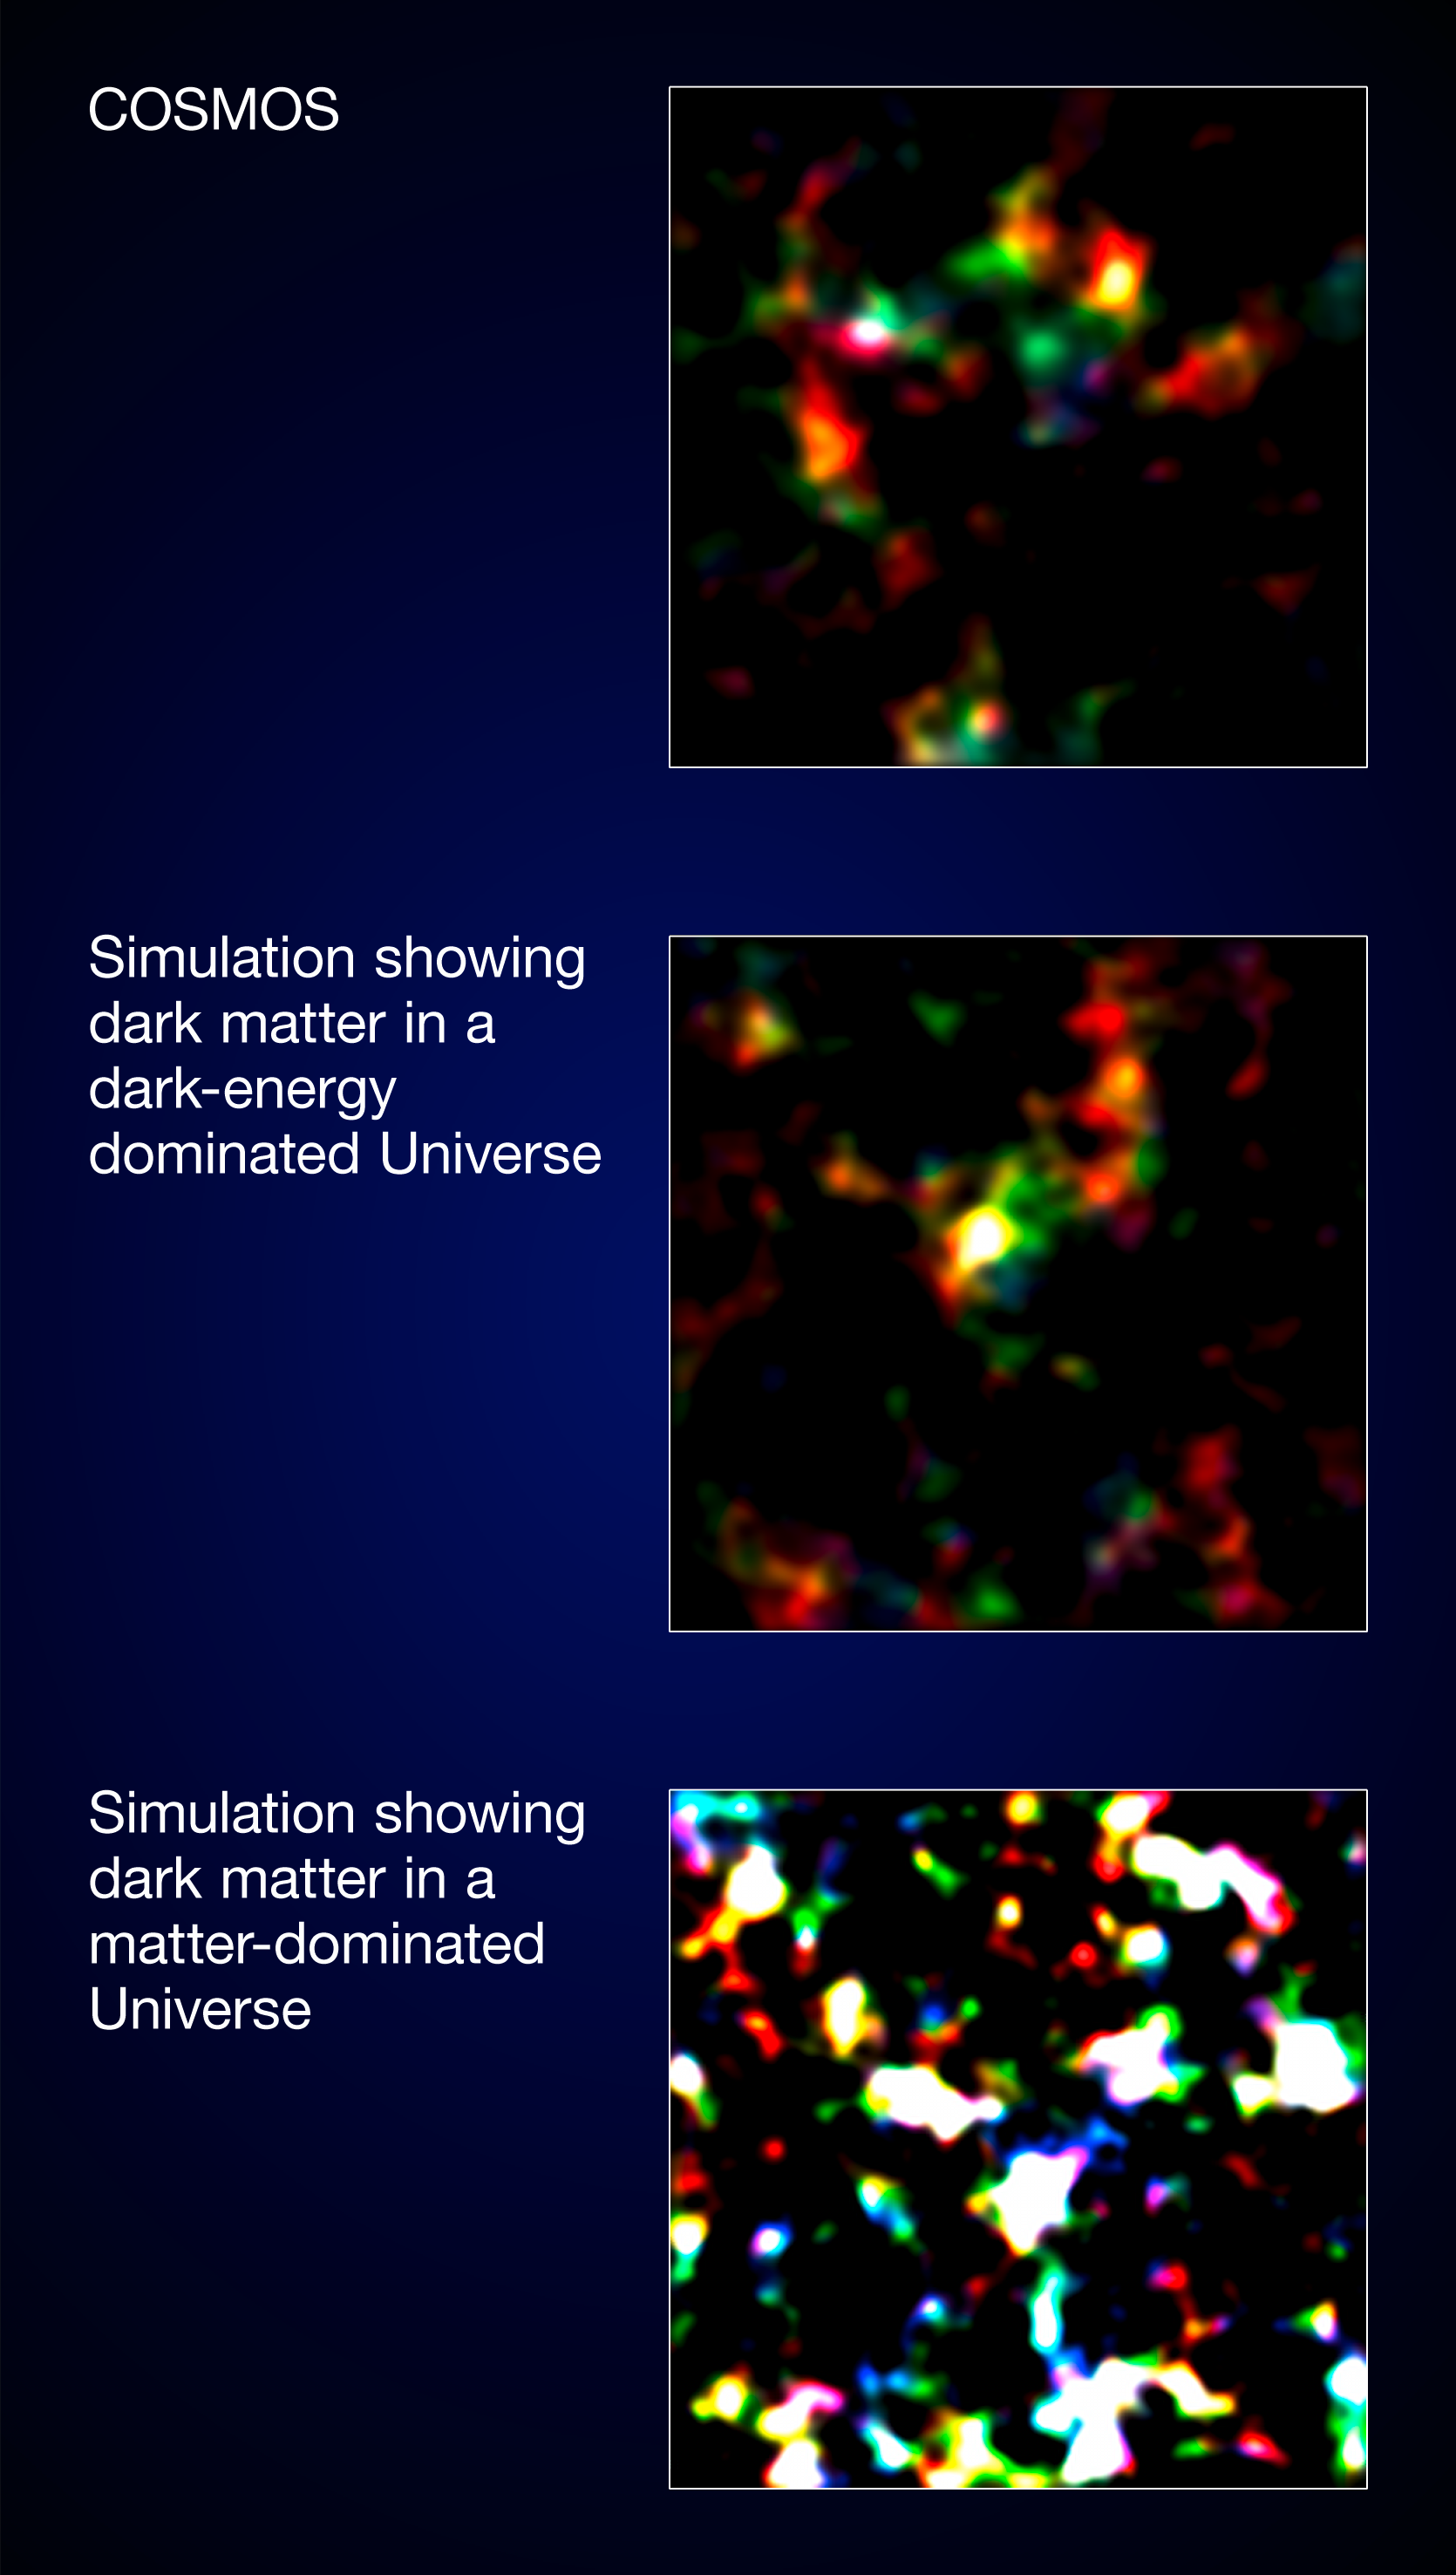

Only dark energy with dark matter fits with COSMOS results

Astronomers who conducted one of the most thorough studies of the COSMOS survey — the largest survey ever undertaken by the NASA/ESA Hubble Space Telescope — compared the actual mass map obtained from COSMOS to two simulated model maps. The statistical properties of dark energy-dominated model (the number of mass peaks and how they cluster), is the best match for the actual COSMOS field.

The researchers have, for the first time ever, used Hubble and the natural "weak lenses" in space to characterise the accelerated expansion of the Universe.

Credit: NASA, ESA, J. Hartlap (University of Bonn), P. Simon (University of Bonn) and T. Schrabback (Leiden Observatory)